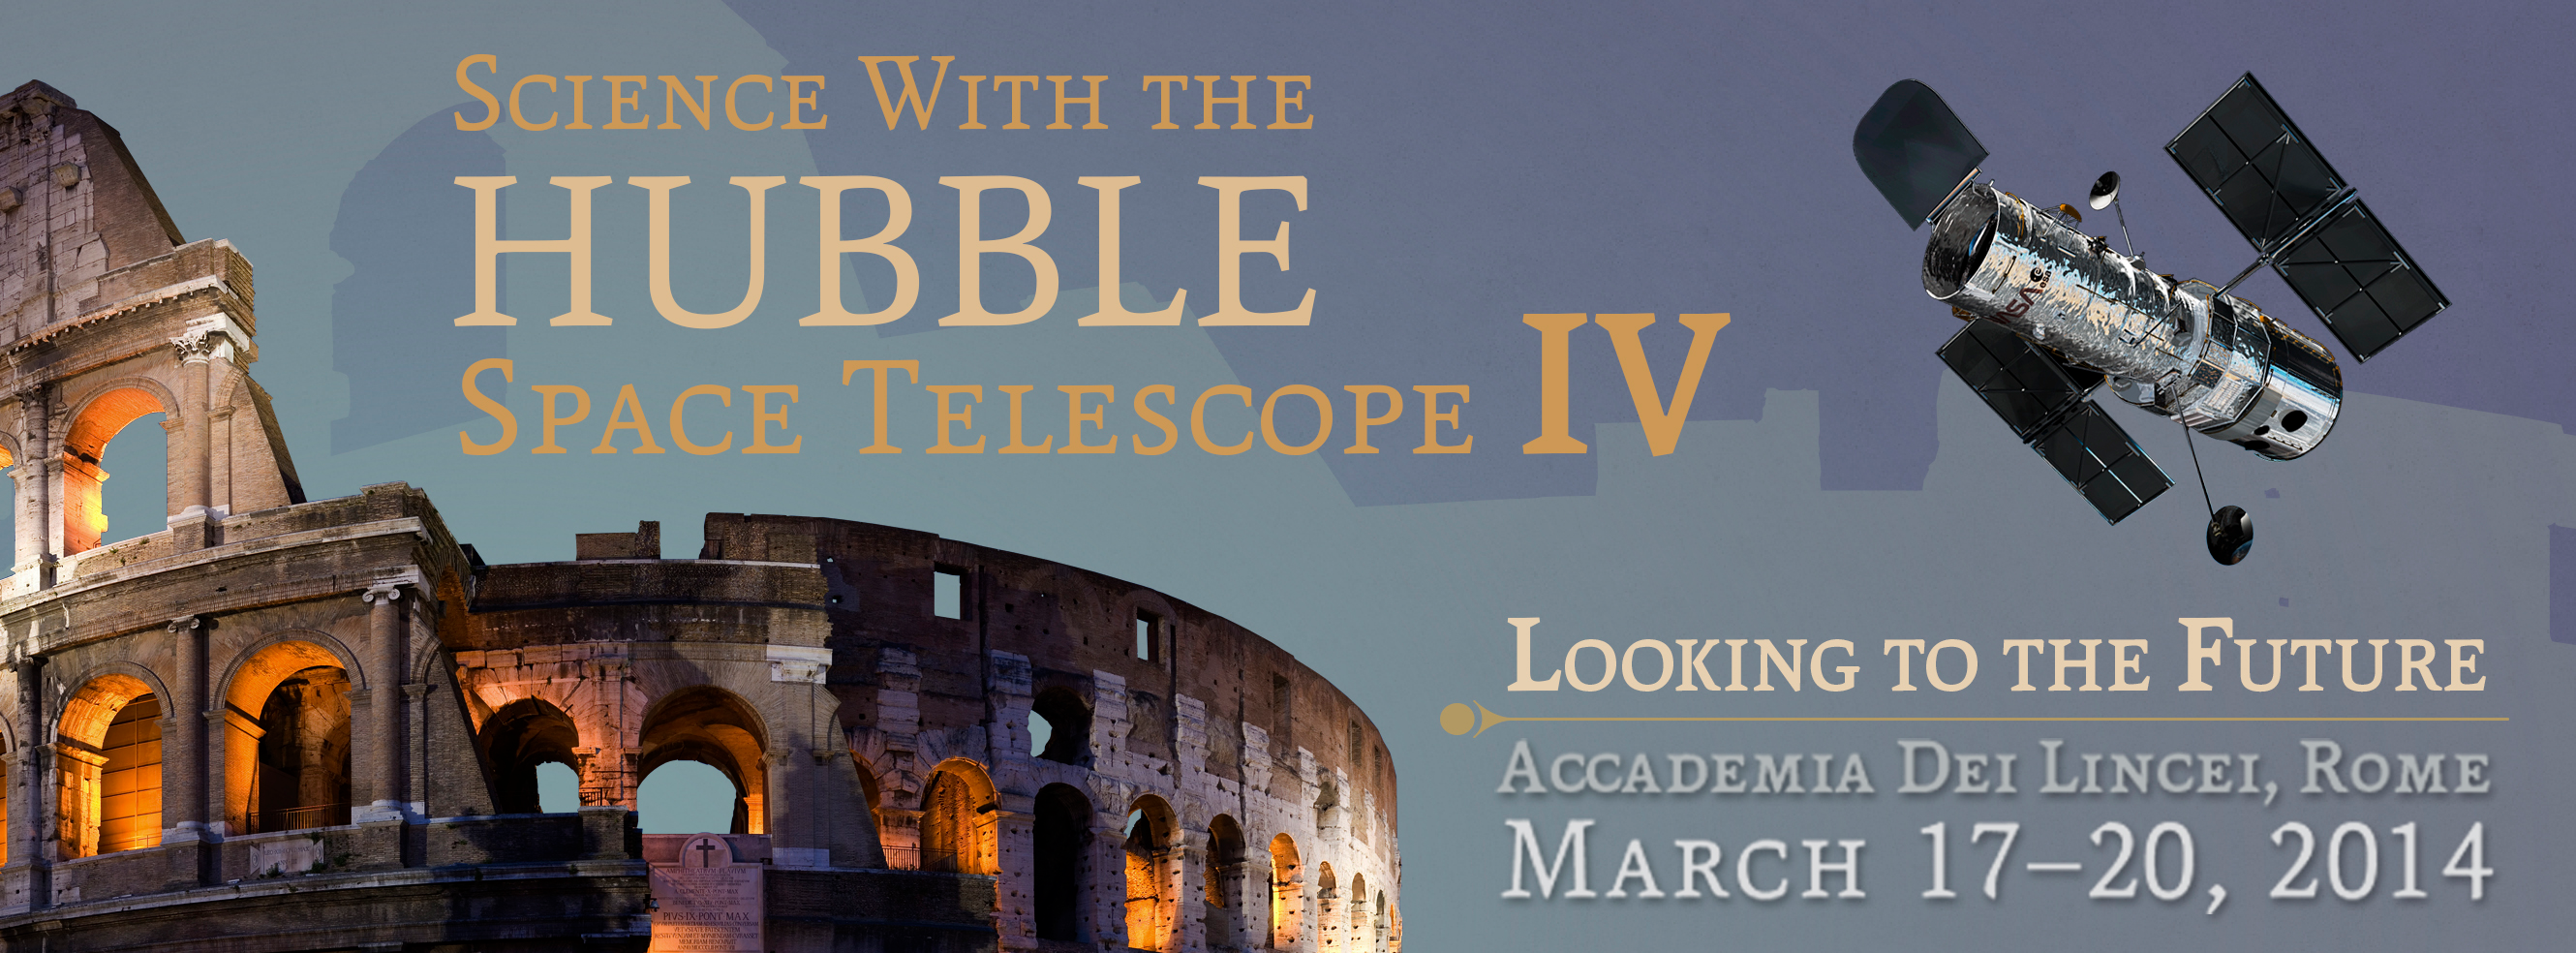

Science with the Hubble Space Telescope IV — 17–20 March 2014

Poster for the conference Science with the Hubble Space Telescope IV, taking place in Rome on 17–20 March 2014.

Credit: NASA & ESA